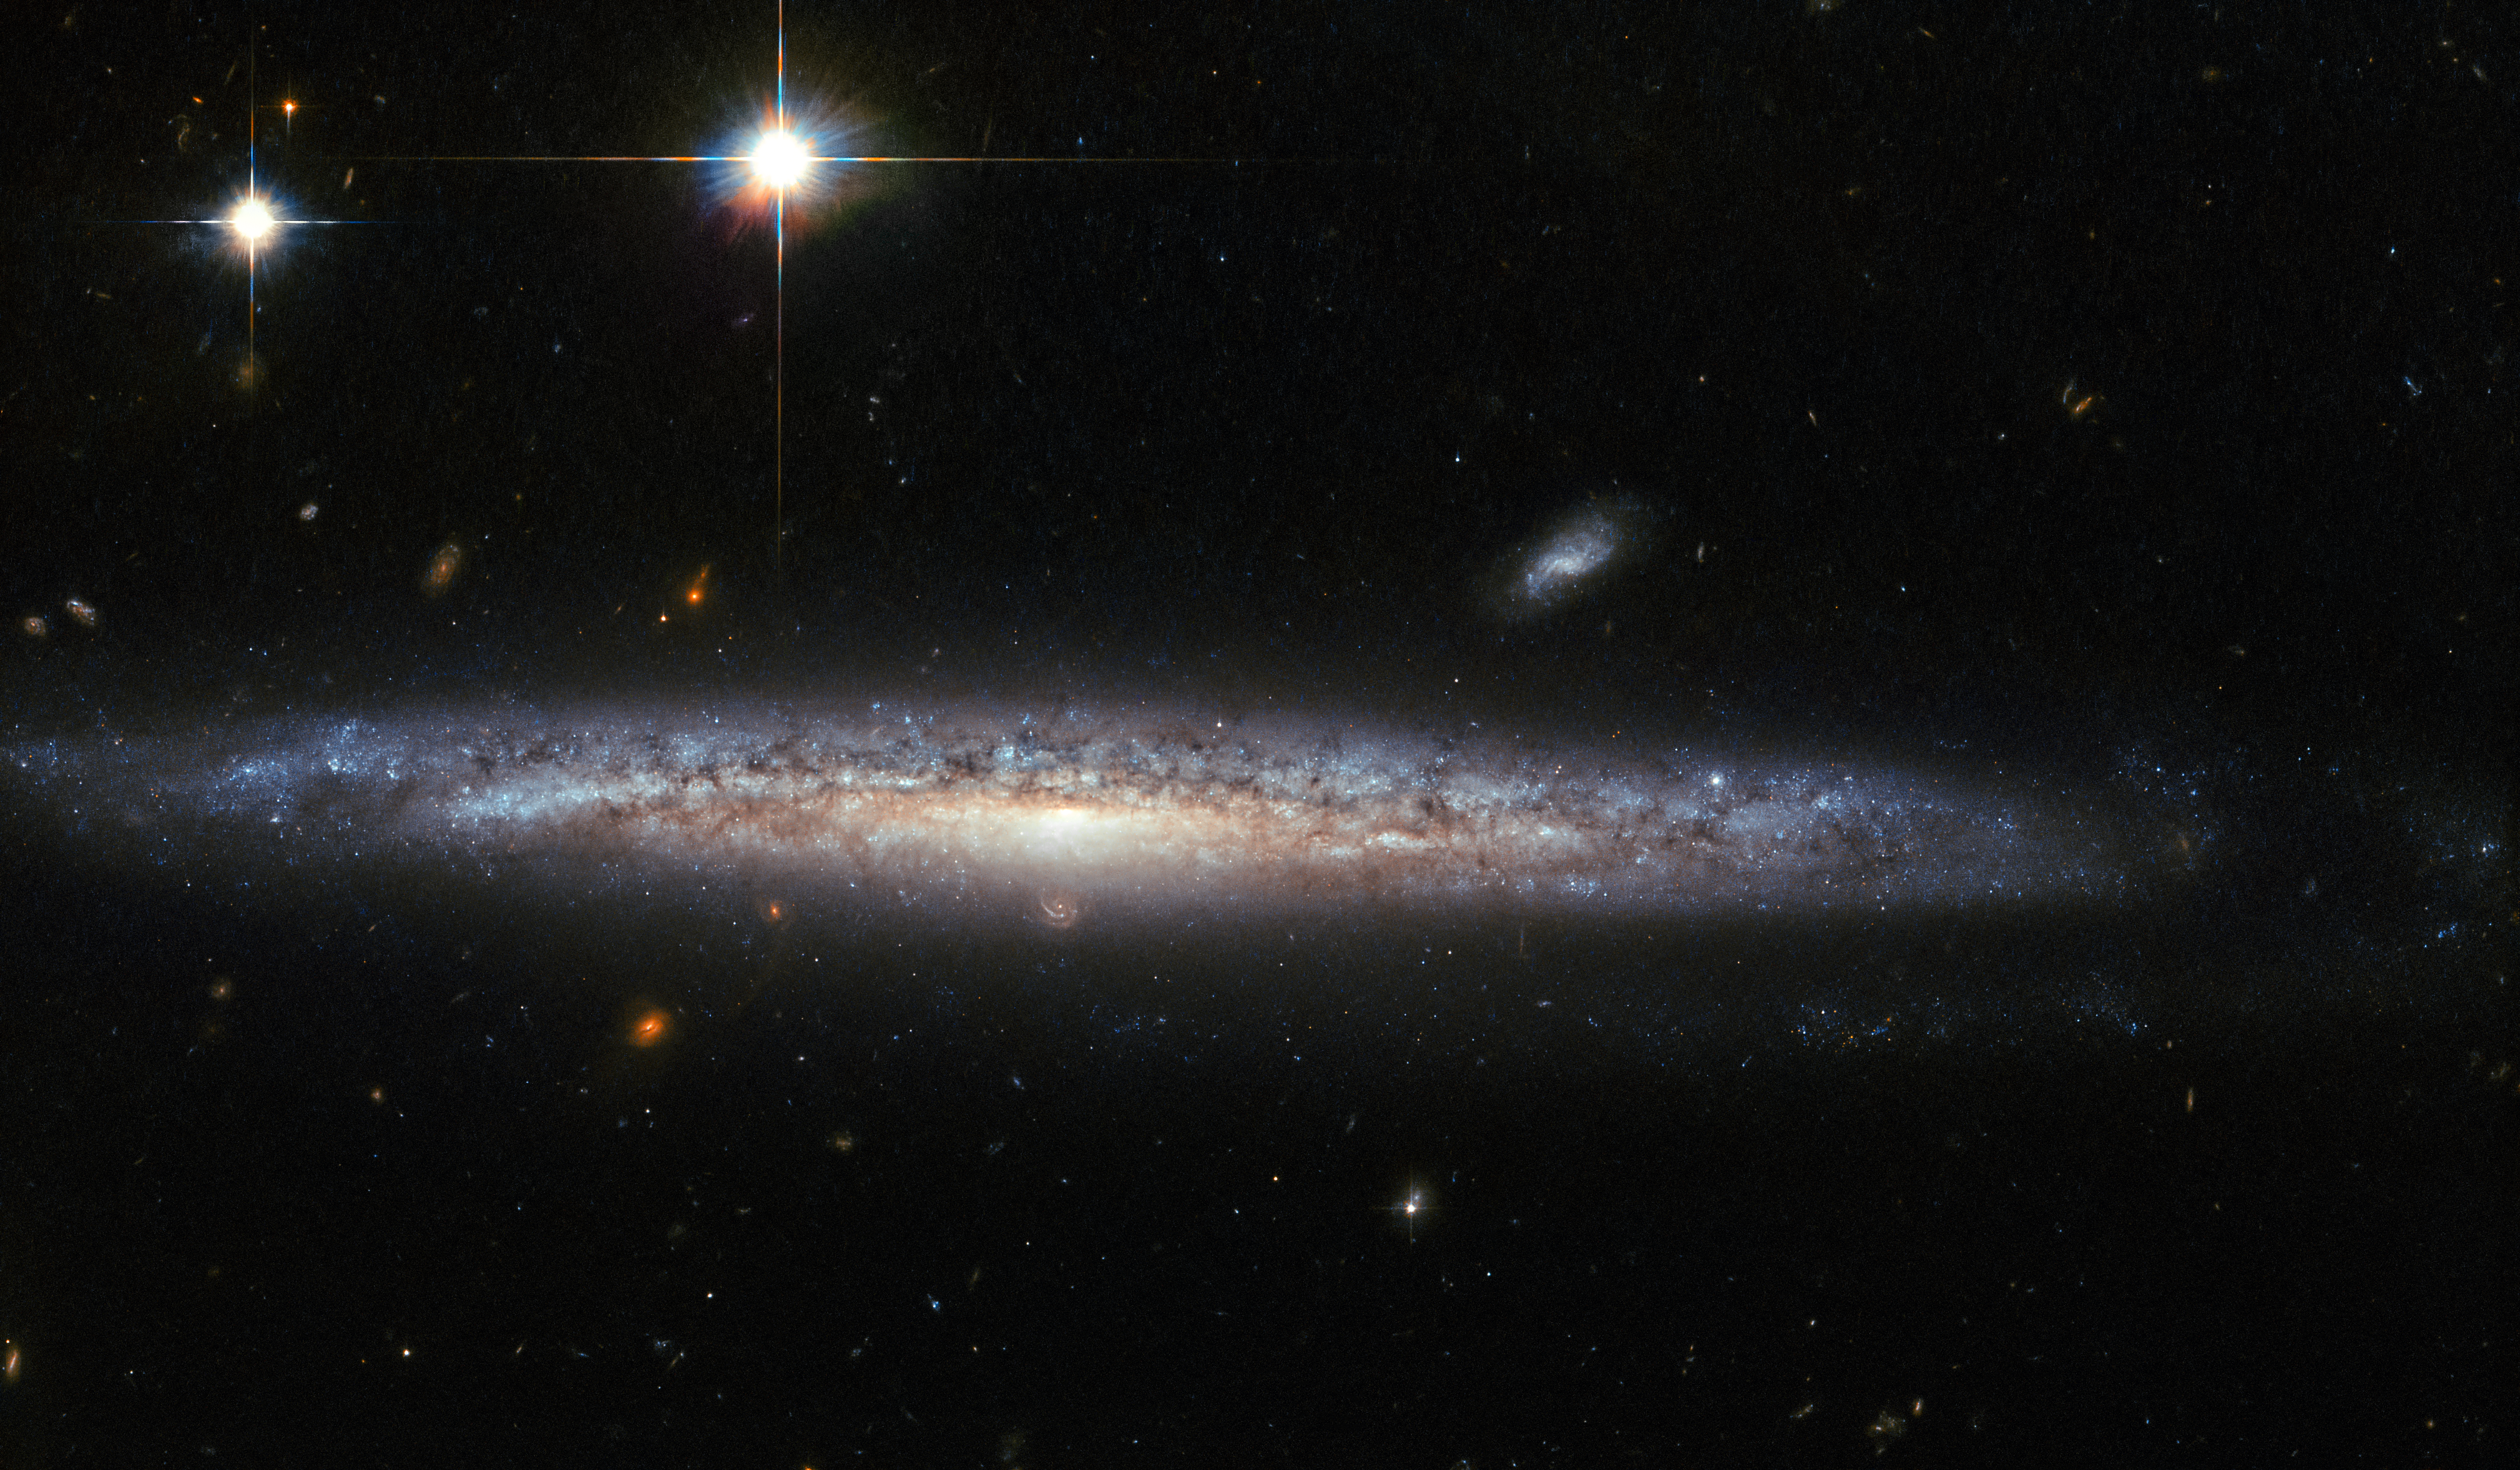

The curious case of calcium-rich supernovae

This image, captured by the Advanced Camera for Surveys (ACS) on the NASA/ESA Hubble Space Telescope, shows the spiral galaxy NGC 5714, about 130 million light-years away in the constellation of Boötes (the Herdsman). NGC 5714 is classified as a Sc spiral galaxy, but its spiral arms — the dominating feature of spiral galaxies — are almost impossible to see, as NGC 5714 presents itself at an almost perfectly edge-on angle.

Discovered by William Herschel in 1787, NGC 5714 was host to a fascinating and rare event in 2003. A faint supernova appeared about 8000 light-years below the central bulge of NGC 5714. Supernovae are the huge, violent explosions of dying stars, and the one that exploded in NGC 5714 — not visible in this much later image — was classified as a Type Ib/c supernova and named SN 2003dr. It was particularly interesting because its spectrum showed strong signatures of calcium.

Calcium-rich supernovae are rare and hence of great interest to astronomers. Astronomers still struggle to explain these particular explosions as their existence presents a challenge to both observation and theory. In particular, their appearance outside of galaxies, their lower luminosity compared to other supernovae, and their rapid evolution are still open questions for researchers.

Credit: ESA/Hubble & NASA